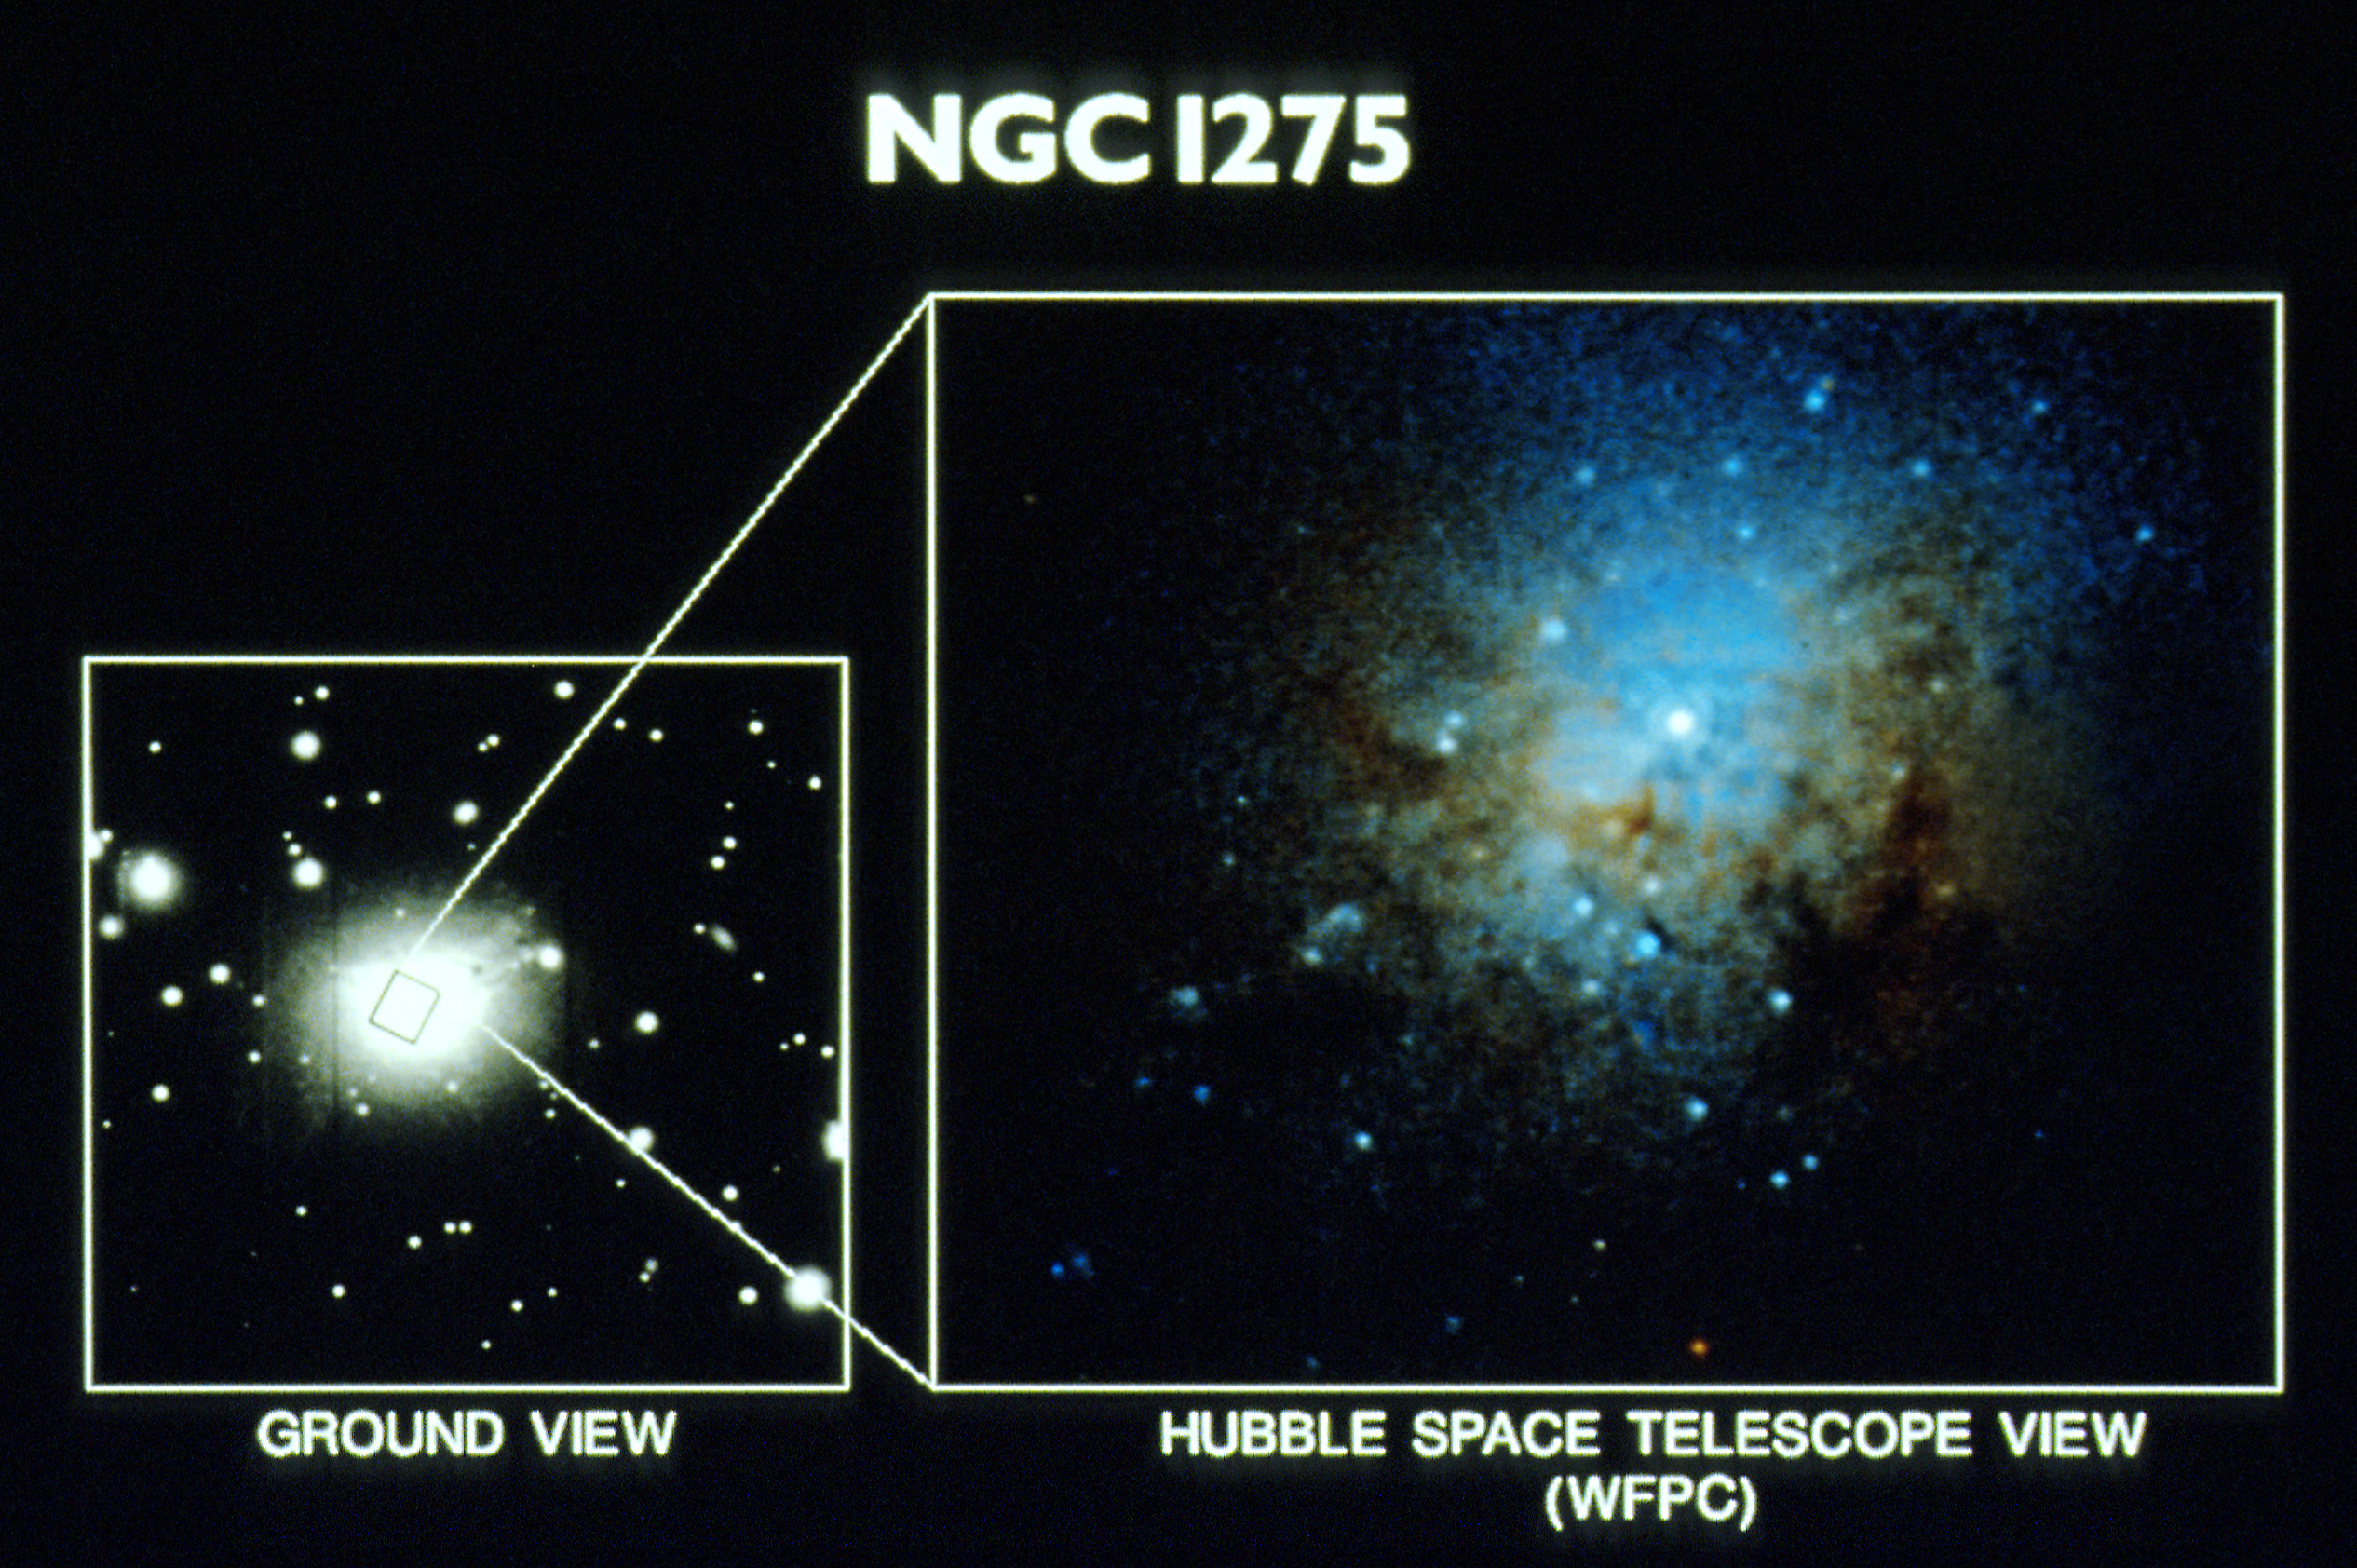

Globular clusters at the core of NGC 1275

This NASA/ESA Hubble Space Telescope Wide Field/Planetary Camera image of the center of the giant elliptical galaxy NGC 1275, reveals about 50 massive and compact globular clusters. This colour picture is a composite of red and green images. Though this is an approximation of a "true color" view, the colours are intensified beyond what one would expect to see with the naked eye. The clusters appear as blue dots. The white dot is the bright and compact core of the galaxy which is partially encircled by large dark filaments of nebulosity. This image is being presented on Thursday, January 16th at the 179th meeting of the American Astronomical Society in Atlanta, Georgia.

Globular clusters typically contain 100,000 to 10 million stars packed in a region 100 light years in diameter. Most globular clusters are made up of very old stars. Surprisingly, those found in NGC 1275 are young. They may have formed from cataclysmic event in the history of the NGC 1275, such as a merger or collision of two galaxies.

Credit: Jon Holtzman (UCSC)1 Sandra M. Faber (UCSC), Edward Shaya (U. Maryland)) Tad R. Lauer (NOAO), Edward Groth (IAS, Princeton), Deidre Hunter (1owell Obs.) and the Wide Field Planetary Camera Instrument Team